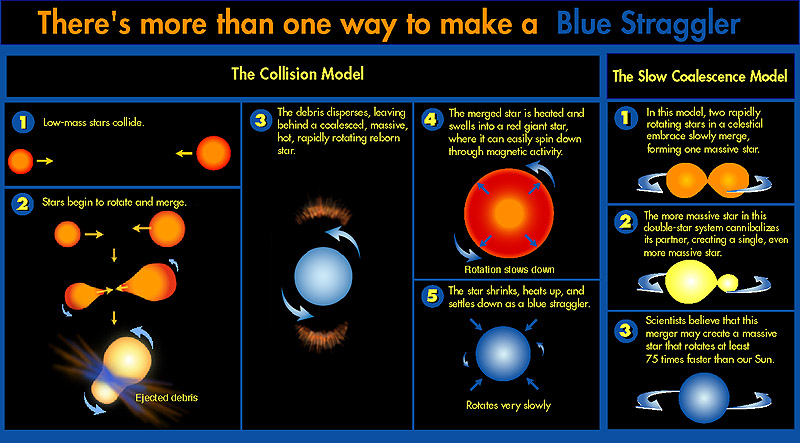

There's more than one way to make a blue straggler

For the first time, astronomers have confirmed that a blue straggler in the core of a globular cluster (a very dense community of stars) is a massive, rapidly rotating star that is spinning 75 times faster than the Sun. This finding provides proof that blue stragglers are created by collisions or other intimate encounters in an overcrowded cluster core.

Credit: NASA & ESA